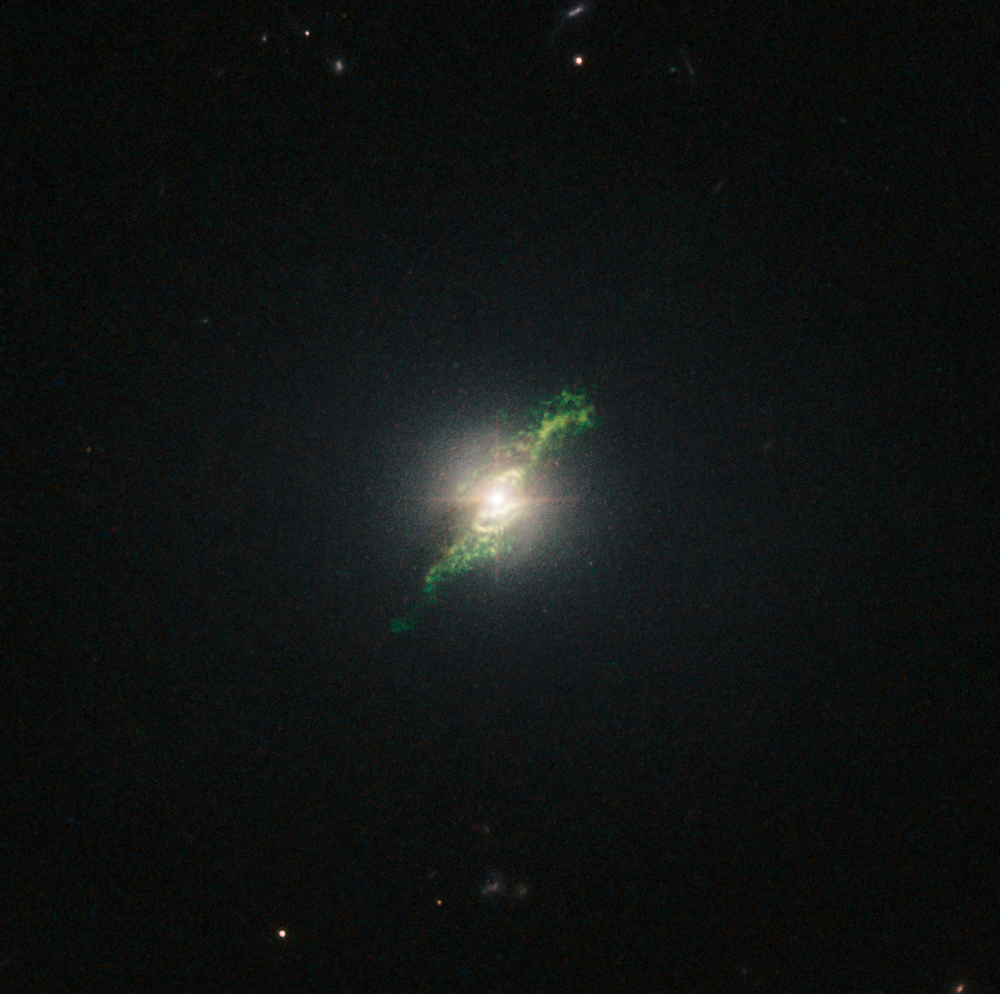

Hubble view of green filament in galaxy Mrk 1498

This new NASA/ESA Hubble Space Telescope image shows ghostly green filaments, lying within galaxy Mrk 1498. This filament was illuminated by a blast of radiation from a quasar — a very luminous and compact region that surrounds the supermassive black hole at the centre of its host galaxy.

Its bright green hue is a result of ionised oxygen, which glows brightly at green wavelengths.

Credit: NASA, ESA, W. Keel (University of Alabama, USA)